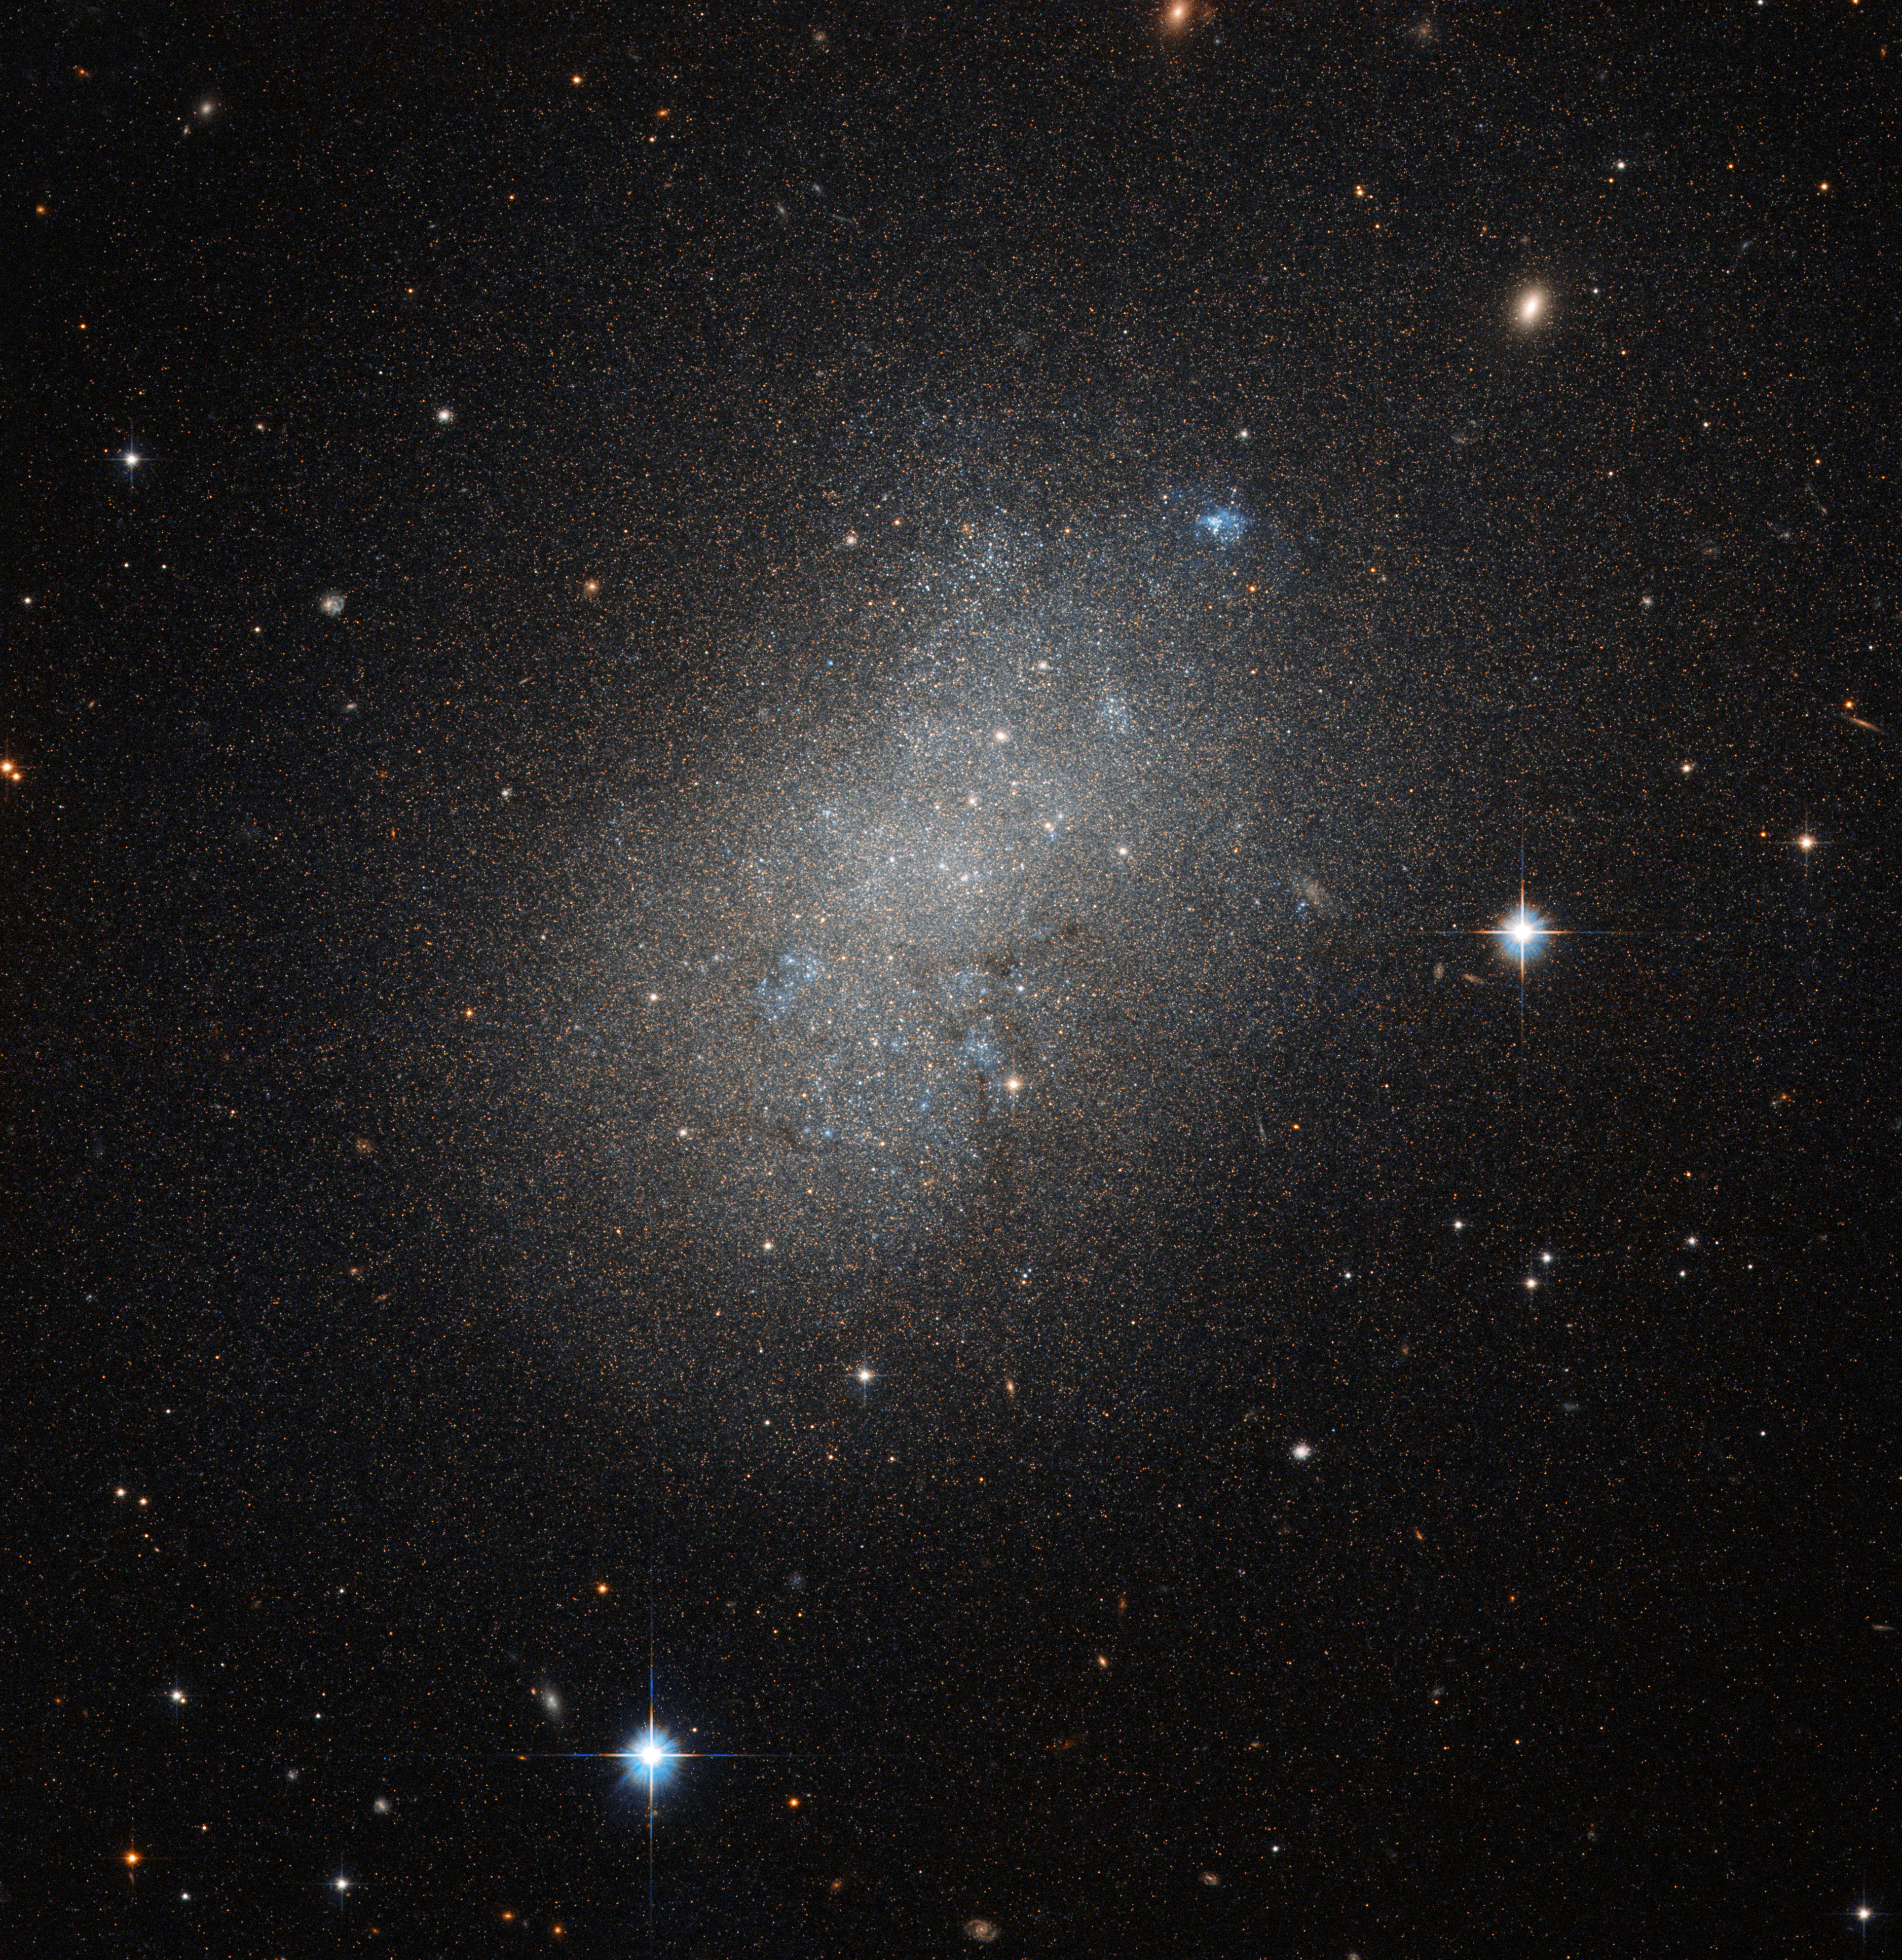

An irregular island

This image, courtesy of the NASA/ESA Hubble Space Telescope’s Advanced Camera for Surveys (ACS), captures the glow of distant stars within NGC 5264, a dwarf galaxy located just over 15 million light-years away in the constellation of Hydra (The Sea Serpent).

Dwarf galaxies like NGC 5264 typically possess around a billion stars — just one per cent of the number of stars found within the Milky Way. They are usually found orbiting other, larger, galaxies such as our own, and are thought to form from the material left over from the messy formation of their larger cosmic relatives.

NGC 5264 clearly possesses an irregular shape — unlike the more common spiral or elliptical galaxies — with knots of blue star formation. Astronomers believe that this is due to the gravitational interactions between NGC 5264 and other galaxies nearby. These past flirtations sparked the formation of new generations of stars, which now glow in bright shades of blue.

Credit: ESA/Hubble & NASA